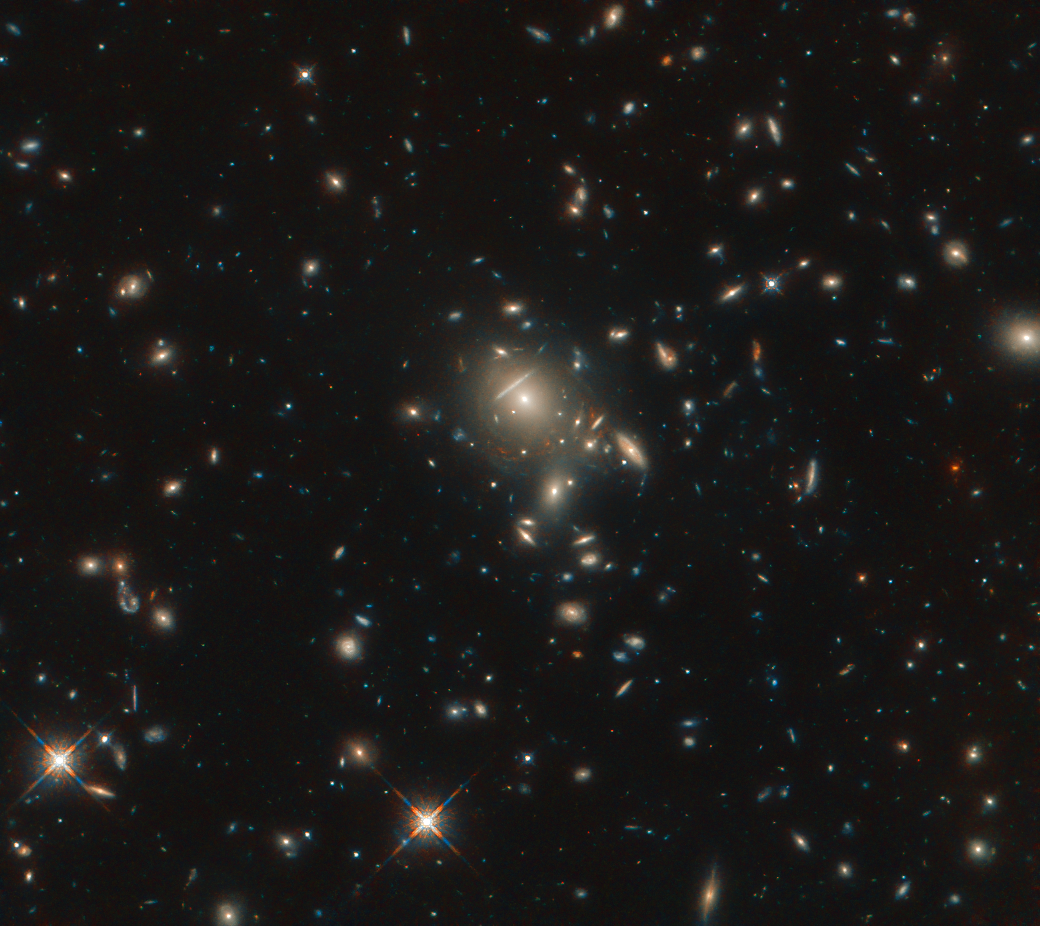

A Bright Find

Seen here in incredible detail, thanks to the NASA/ESA Hubble Space Telescope, is the starburst galaxy formally known as PLCK G045.1+61.1. The galaxy appears as multiple reddish dots near the center of the image and is being gravitationally lensed by a cluster of closer galaxies that are also visible in this image.

Gravitational lensing occurs when a large distribution of matter, such as a galaxy cluster, sits between Earth and a distant light source. As space is warped by massive objects, the light from the distant object bends as it travels to us. This effect was first predicted by Einstein’s general theory of relativity.

From 2009 to 2013, the European Space Agency’s Planck space observatory captured multiple all-sky surveys. In the course of these surveys, with complementary observations by the Herschel Space Observatory, Planck discovered some of the brightest gravitationally lensed high-redshift galaxies in the night sky.

It was during the study of these Planck-Herschel selected sources using Hubble that the optical starlight emitted from this ultra-bright galaxy was found.

Credit: ESA/Hubble & NASA, B. Frye